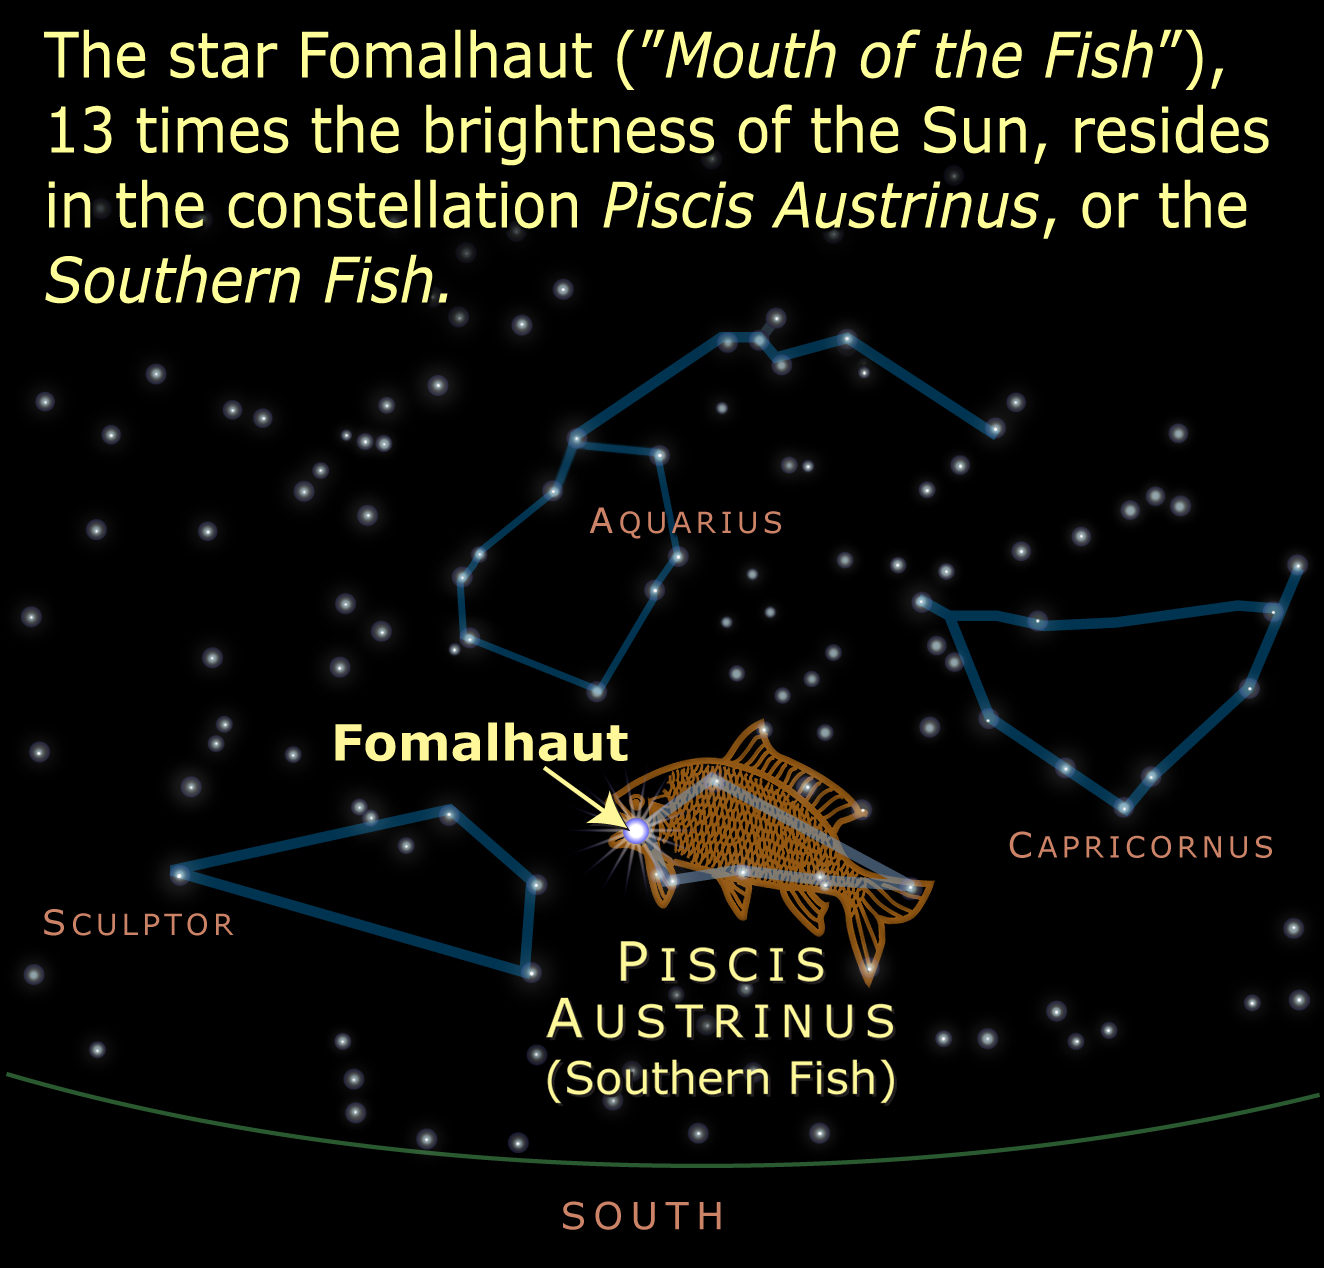

Constellation Location

The star Fomalhaut ("Mouth of the Fish"), 13 times the brightness of the Sun, resides in the constellation, Piscis Austrinus, or the Southern Fish.

Credit: NASA, ESA and A. Feild (STScI)